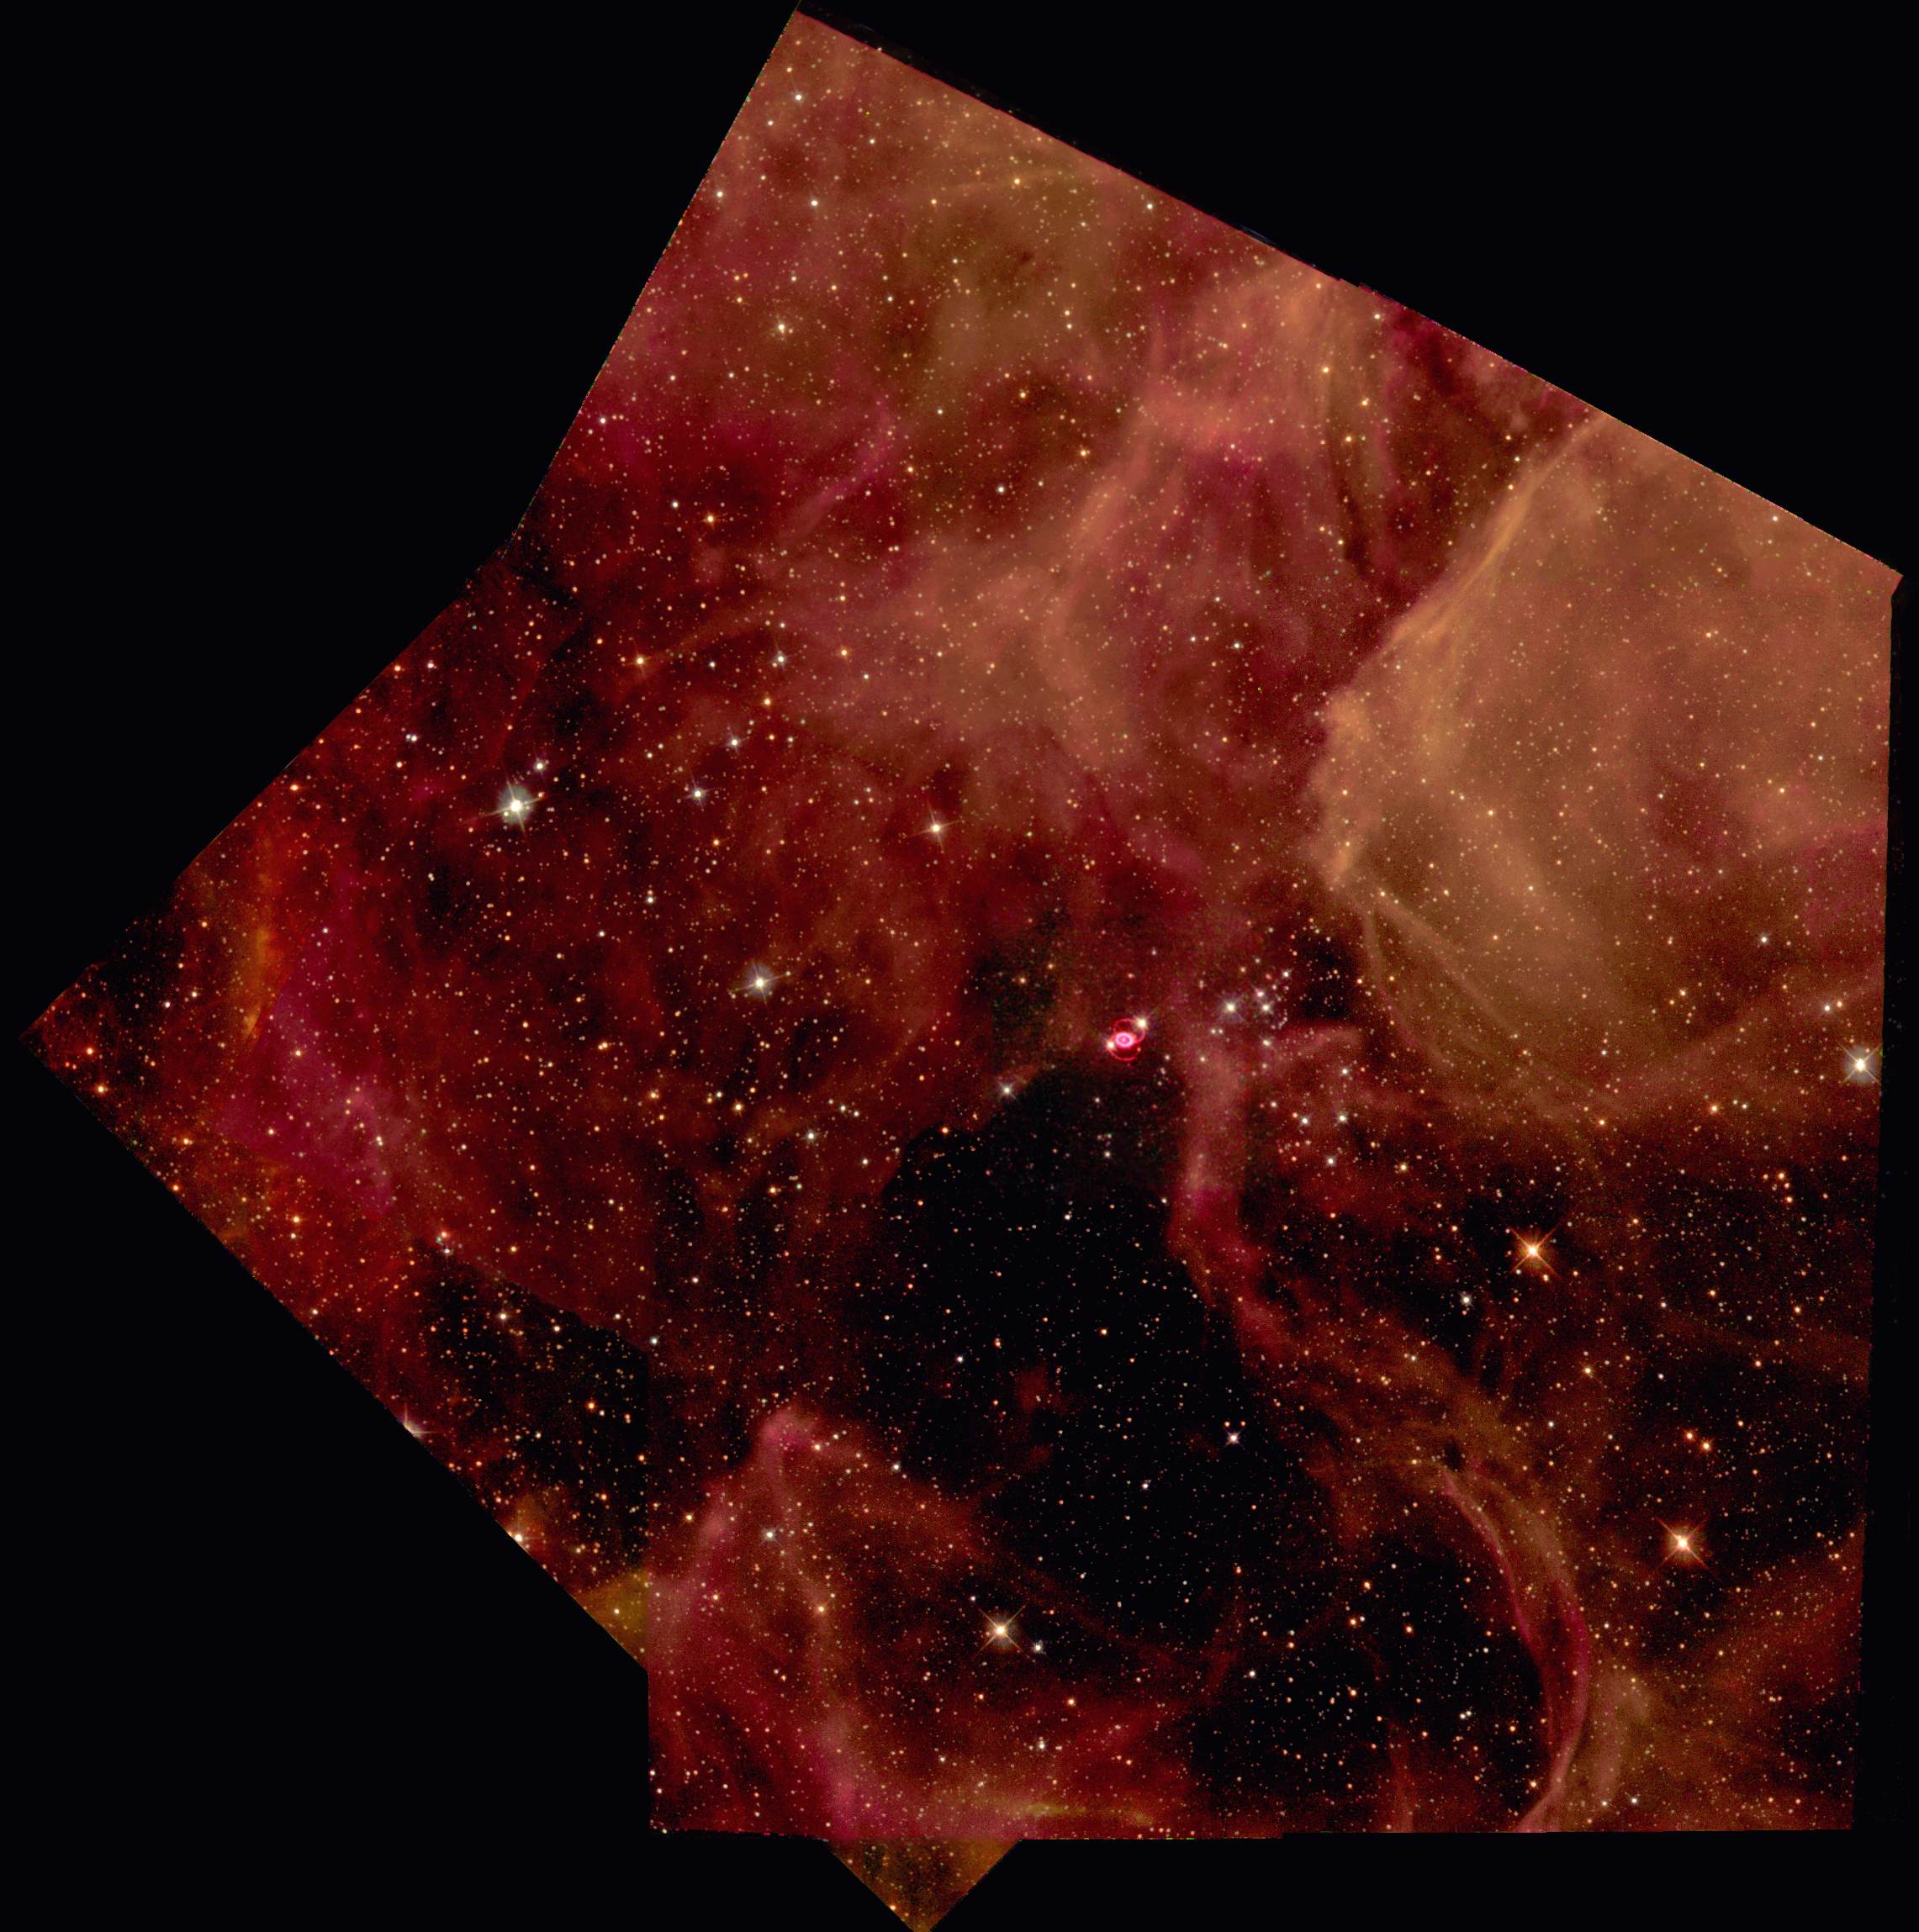

SN 1987a in the Large Magellanic Cloud

Glittering stars and wisps of gas create a breathtaking backdrop for the self-destruction of a massive star, called supernova 1987A, in the Large Magellanic Cloud, a nearby galaxy. Astronomers in the Southern hemisphere witnessed the brilliant explosion of this star on Feb. 23, 1987.

Shown in this NASA/ESA Hubble Space Telescope image, the supernova remnant, surrounded by inner and outer rings of material, is set in a forest of ethereal, diffuse clouds of gas. This three-color image is composed of several pictures of the supernova and its neighboring region taken with the Wide Field and Planetary Camera 2in Sept. 1994, Feb. 1996 and July 1997.

Credit: Hubble Heritage Team (AURA/STScI/NASA/ESA)